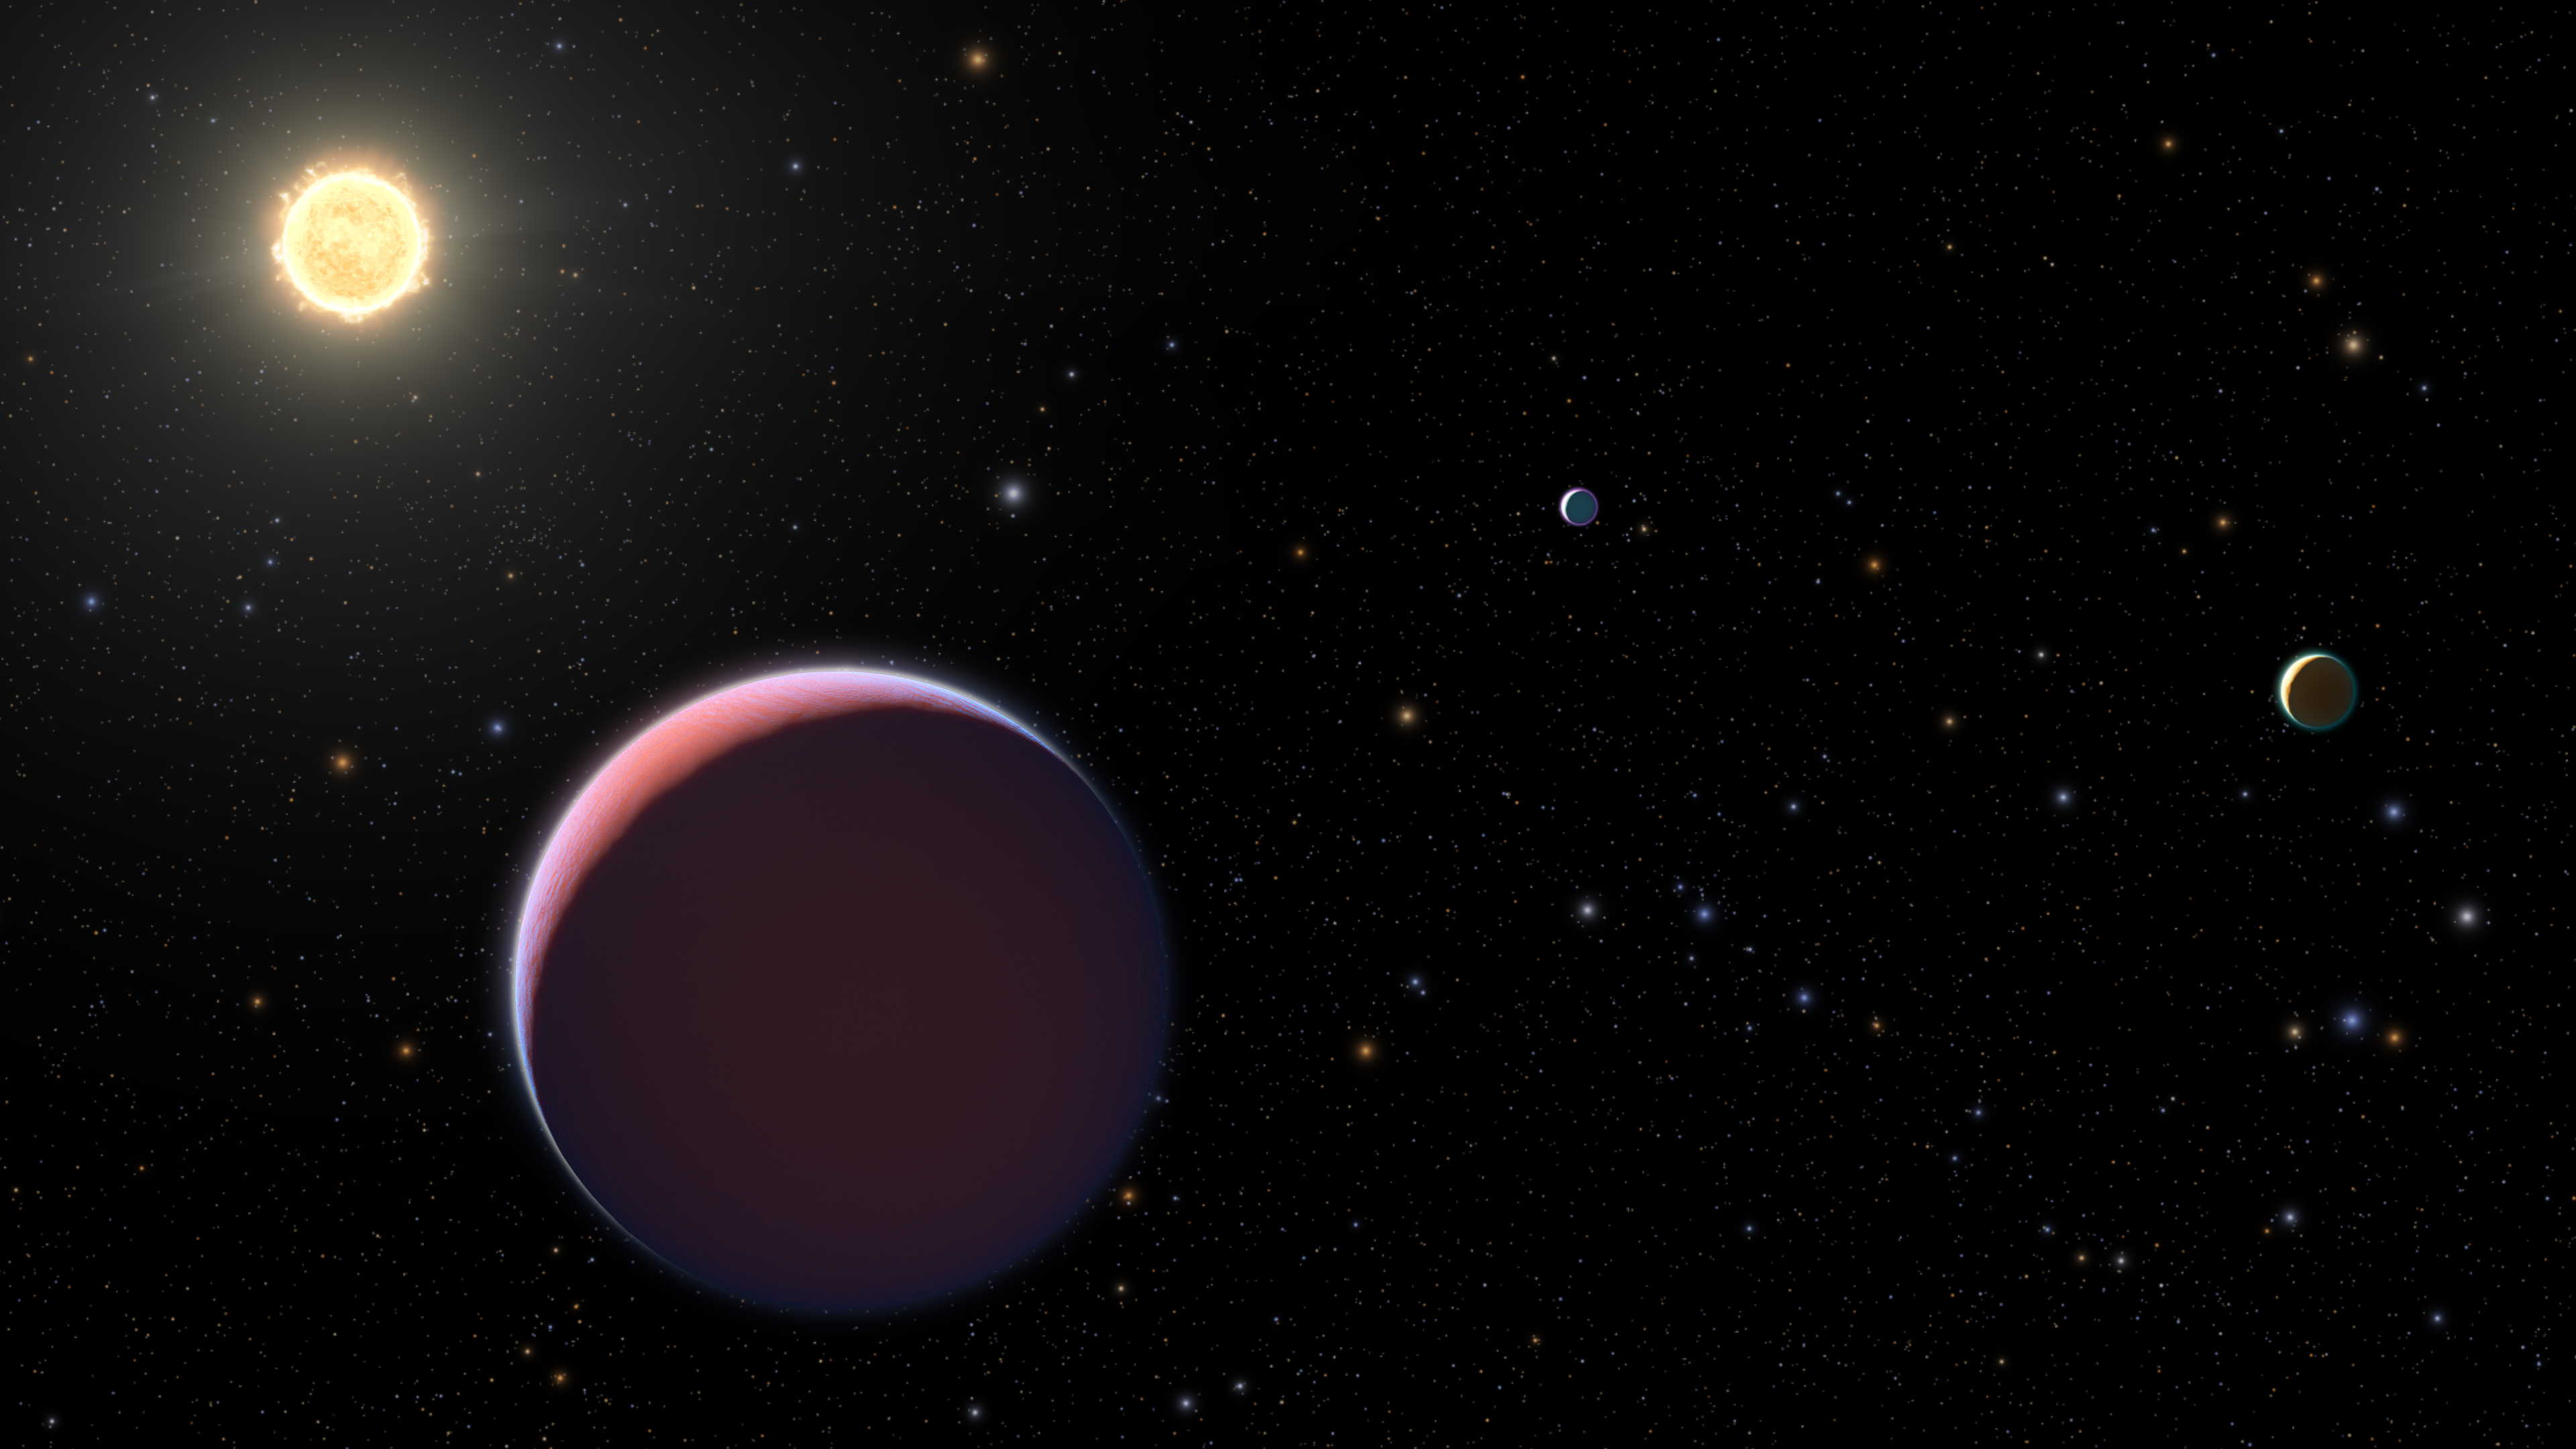

Hubble Probes Cotton Candy Planets

New observations from the NASA/ESA Hubble Space Telescope have provided the first spectroscopic observations of two of these super-puffy planets, which are located in the Kepler-51 system.

The recent Hubble observations allowed a team of astronomers to refine the mass and size estimates for these worlds – independently confirming their “puffy” nature. Though no more than several times the mass of Earth, their hydrogen/helium atmospheres are so bloated they are nearly the size of Jupiter. In other words, these planets might look as big and bulky as Jupiter, but are roughly 1/100th the mass of Jupiter.

How and why their atmospheres balloon outwards remains unknown, but this feature makes super-puffs prime targets for atmospheric investigation. Using Hubble, the team went looking for evidence of components, notably water, in the atmospheres of Kepler-51b and 51d. Hubble observed the planets when they passed in front of their star, aiming to observe the infrared color of their sunsets. Astronomers deduced the amount of light absorbed by the atmosphere across a range of infrared light wavelengths, thus creating a spectrum for each planet in hopes of seeing the telltale signs of constituents like water in the features of the spectra.

The team concluded that the low densities of these planets are in part a consequence of the young age of the system, a mere 500 million years old. Models suggest these planets formed outside of the star’s “snow line” where icy materials can survive. The planets then migrated inward, like a string of railroad cars.

Credit: NASA, ESA, and NRAO